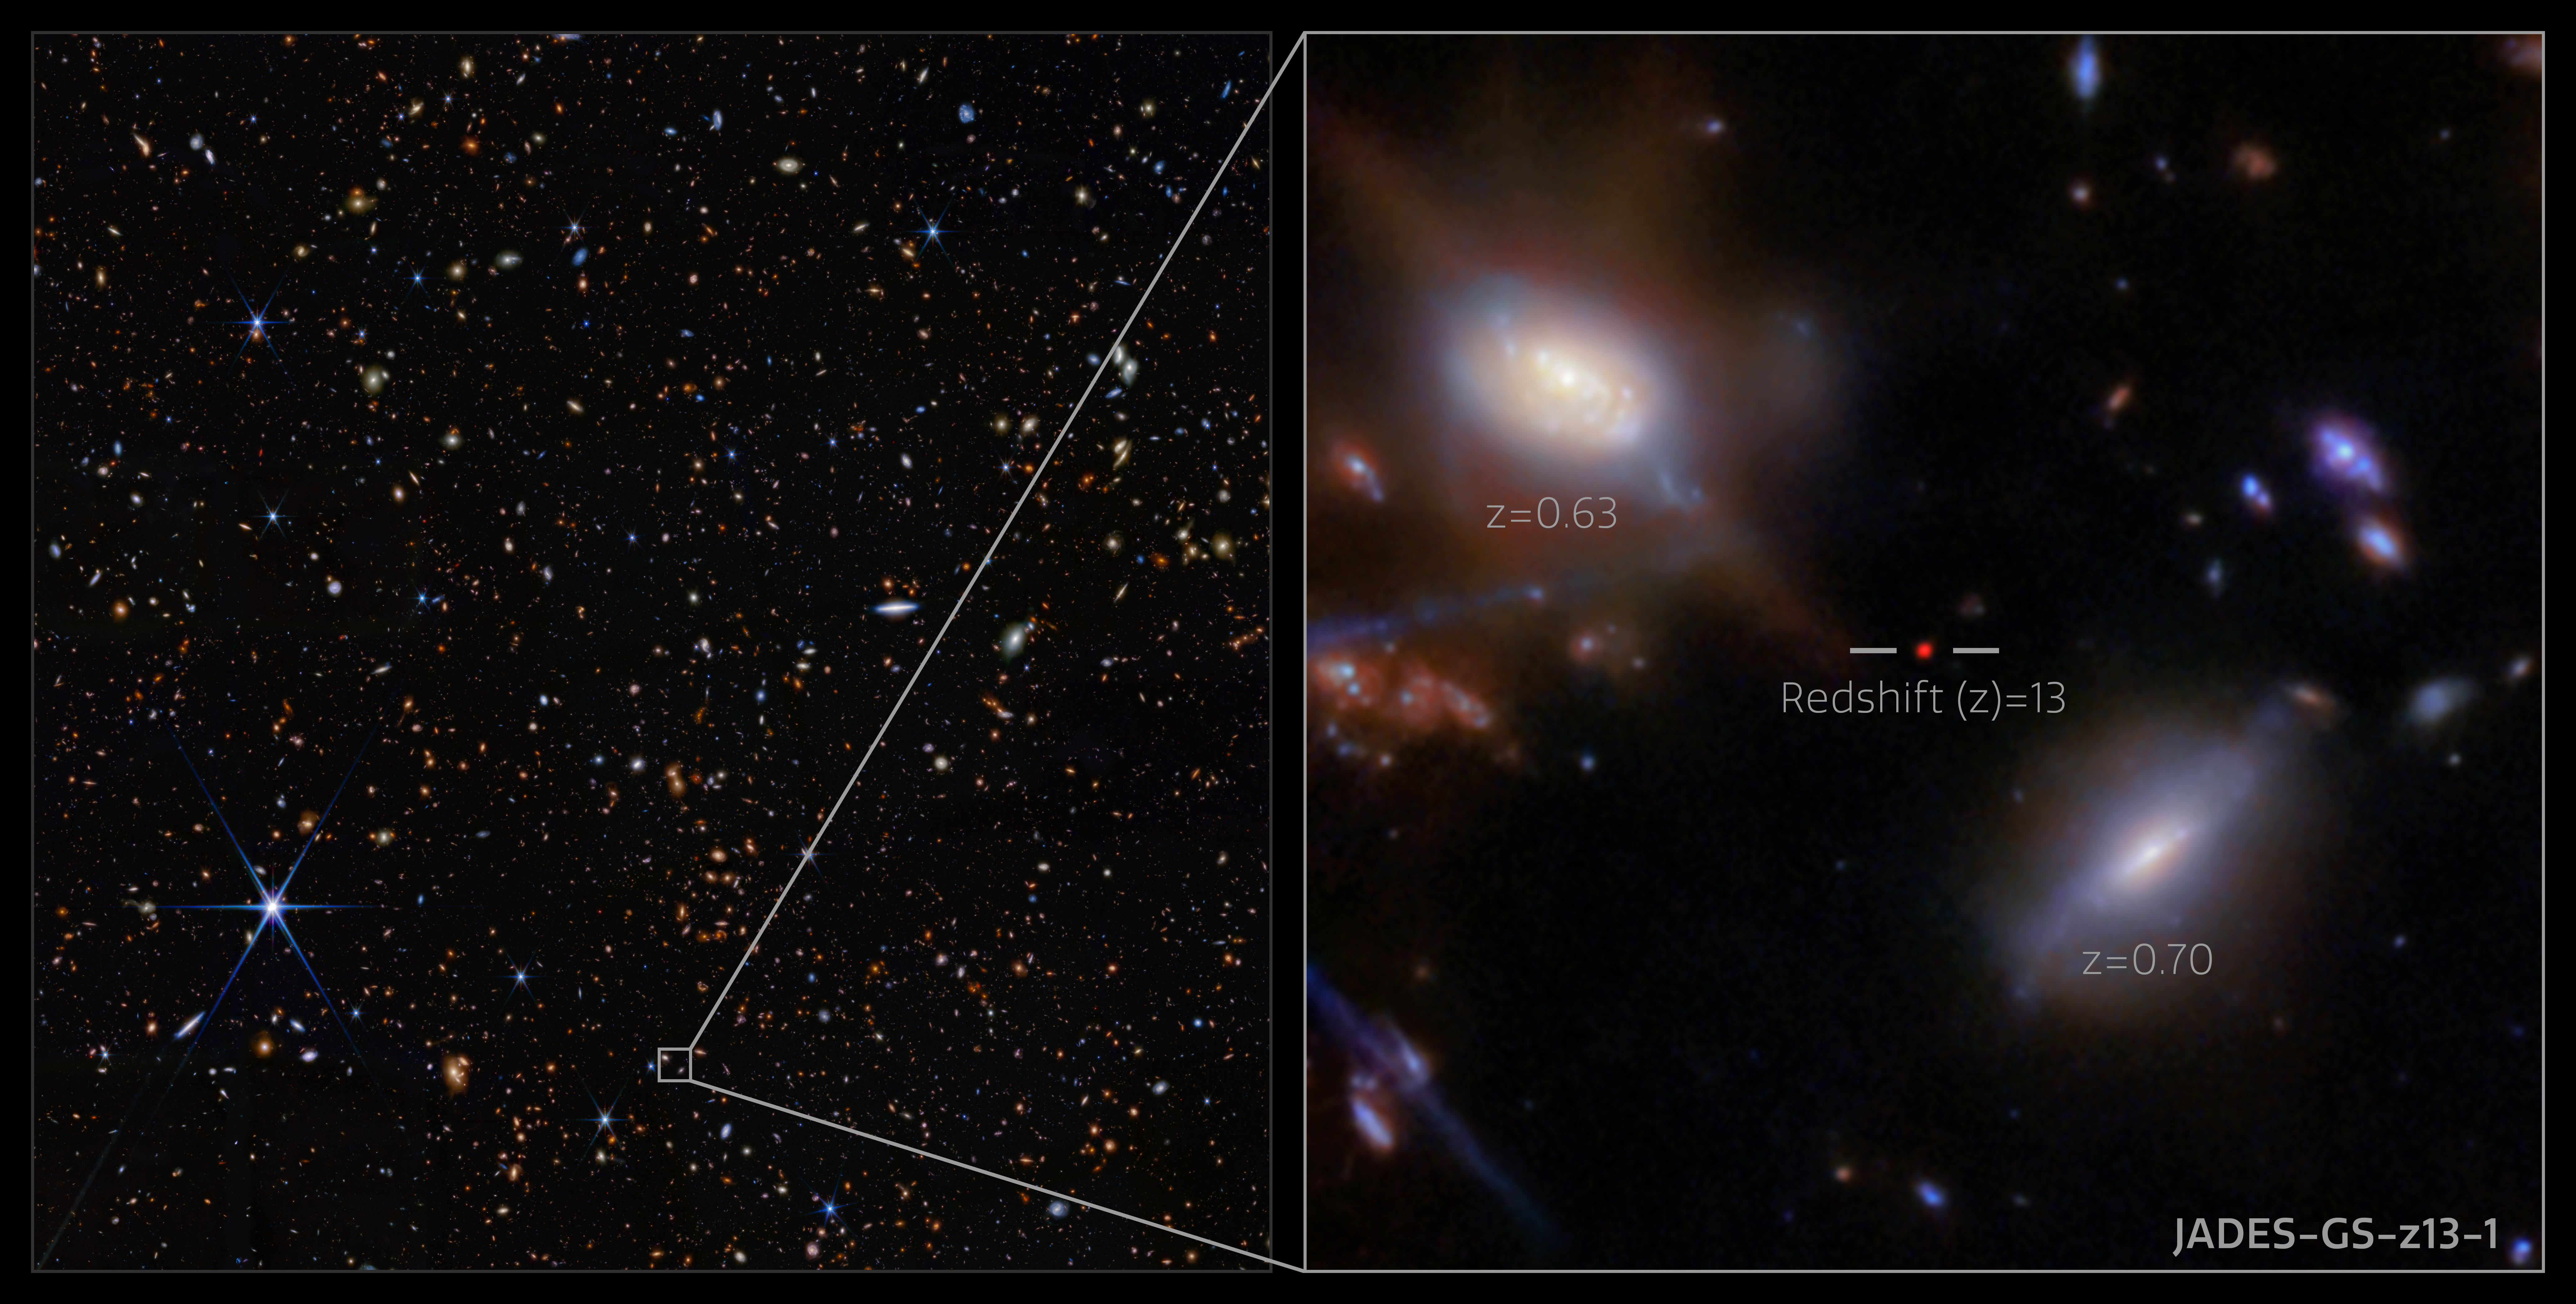

JADES-GS-z13-1 in the GOODS-S field (NIRCam image, annotated)

The incredibly distant galaxy GS-z13-1, observed just 330 million years after the Big Bang, was initially discovered with deep imaging from the NASA/ESA/CSA James Webb Space Telescope. Now, an international team of astronomers has definitively identified powerful hydrogen emission from this galaxy at an unexpectedly early period in the Universe’s history, a probable sign that we are seeing some of the first hot stars from the dawn of the Universe.

This image shows the location of the galaxy GS-z13-1 in the GOODS-S field, as well as the galaxy itself, imaged with Webb’s Near-Infrared Camera (NIRCam) as part of the JWST Advanced Deep Extragalactic Survey (JADES) programme. These data from NIRCam allowed researchers to identify GS-z13-1 as an incredibly distant galaxy, and to put an estimate on its redshift value. Webb’s unique infrared sensitivity is necessary to observe galaxies at this extreme distance, whose light has been redshifted into infrared wavelengths during its long journey across the cosmos.

To confirm the galaxy’s redshift, the team turned to Webb’s Near-Infrared Spectrograph (NIRSpec) instrument. With new observations permitting advanced spectroscopy of the galaxy’s emitted light, the team not only confirmed GS-z13-1’s redshift of 13.0, they also revealed the strong presence of a type of ultraviolet radiation called Lyman-α emission. This is a telltale sign of the presence of newly forming stars, or a possible active galactic nucleus in the galaxy, but at a much earlier time than astronomers had thought possible. The result holds great implications for our understanding of the Universe.

Credit: ESA/Webb, NASA, STScI, CSA, JADES Collaboration, Brant Robertson (UC Santa Cruz), Ben Johnson (CfA), Sandro Tacchella (Cambridge), Phill Cargile (CfA), J. Witstok, P. Jakobsen, A. Pagan (STScI), M. Zamani (ESA/Webb)